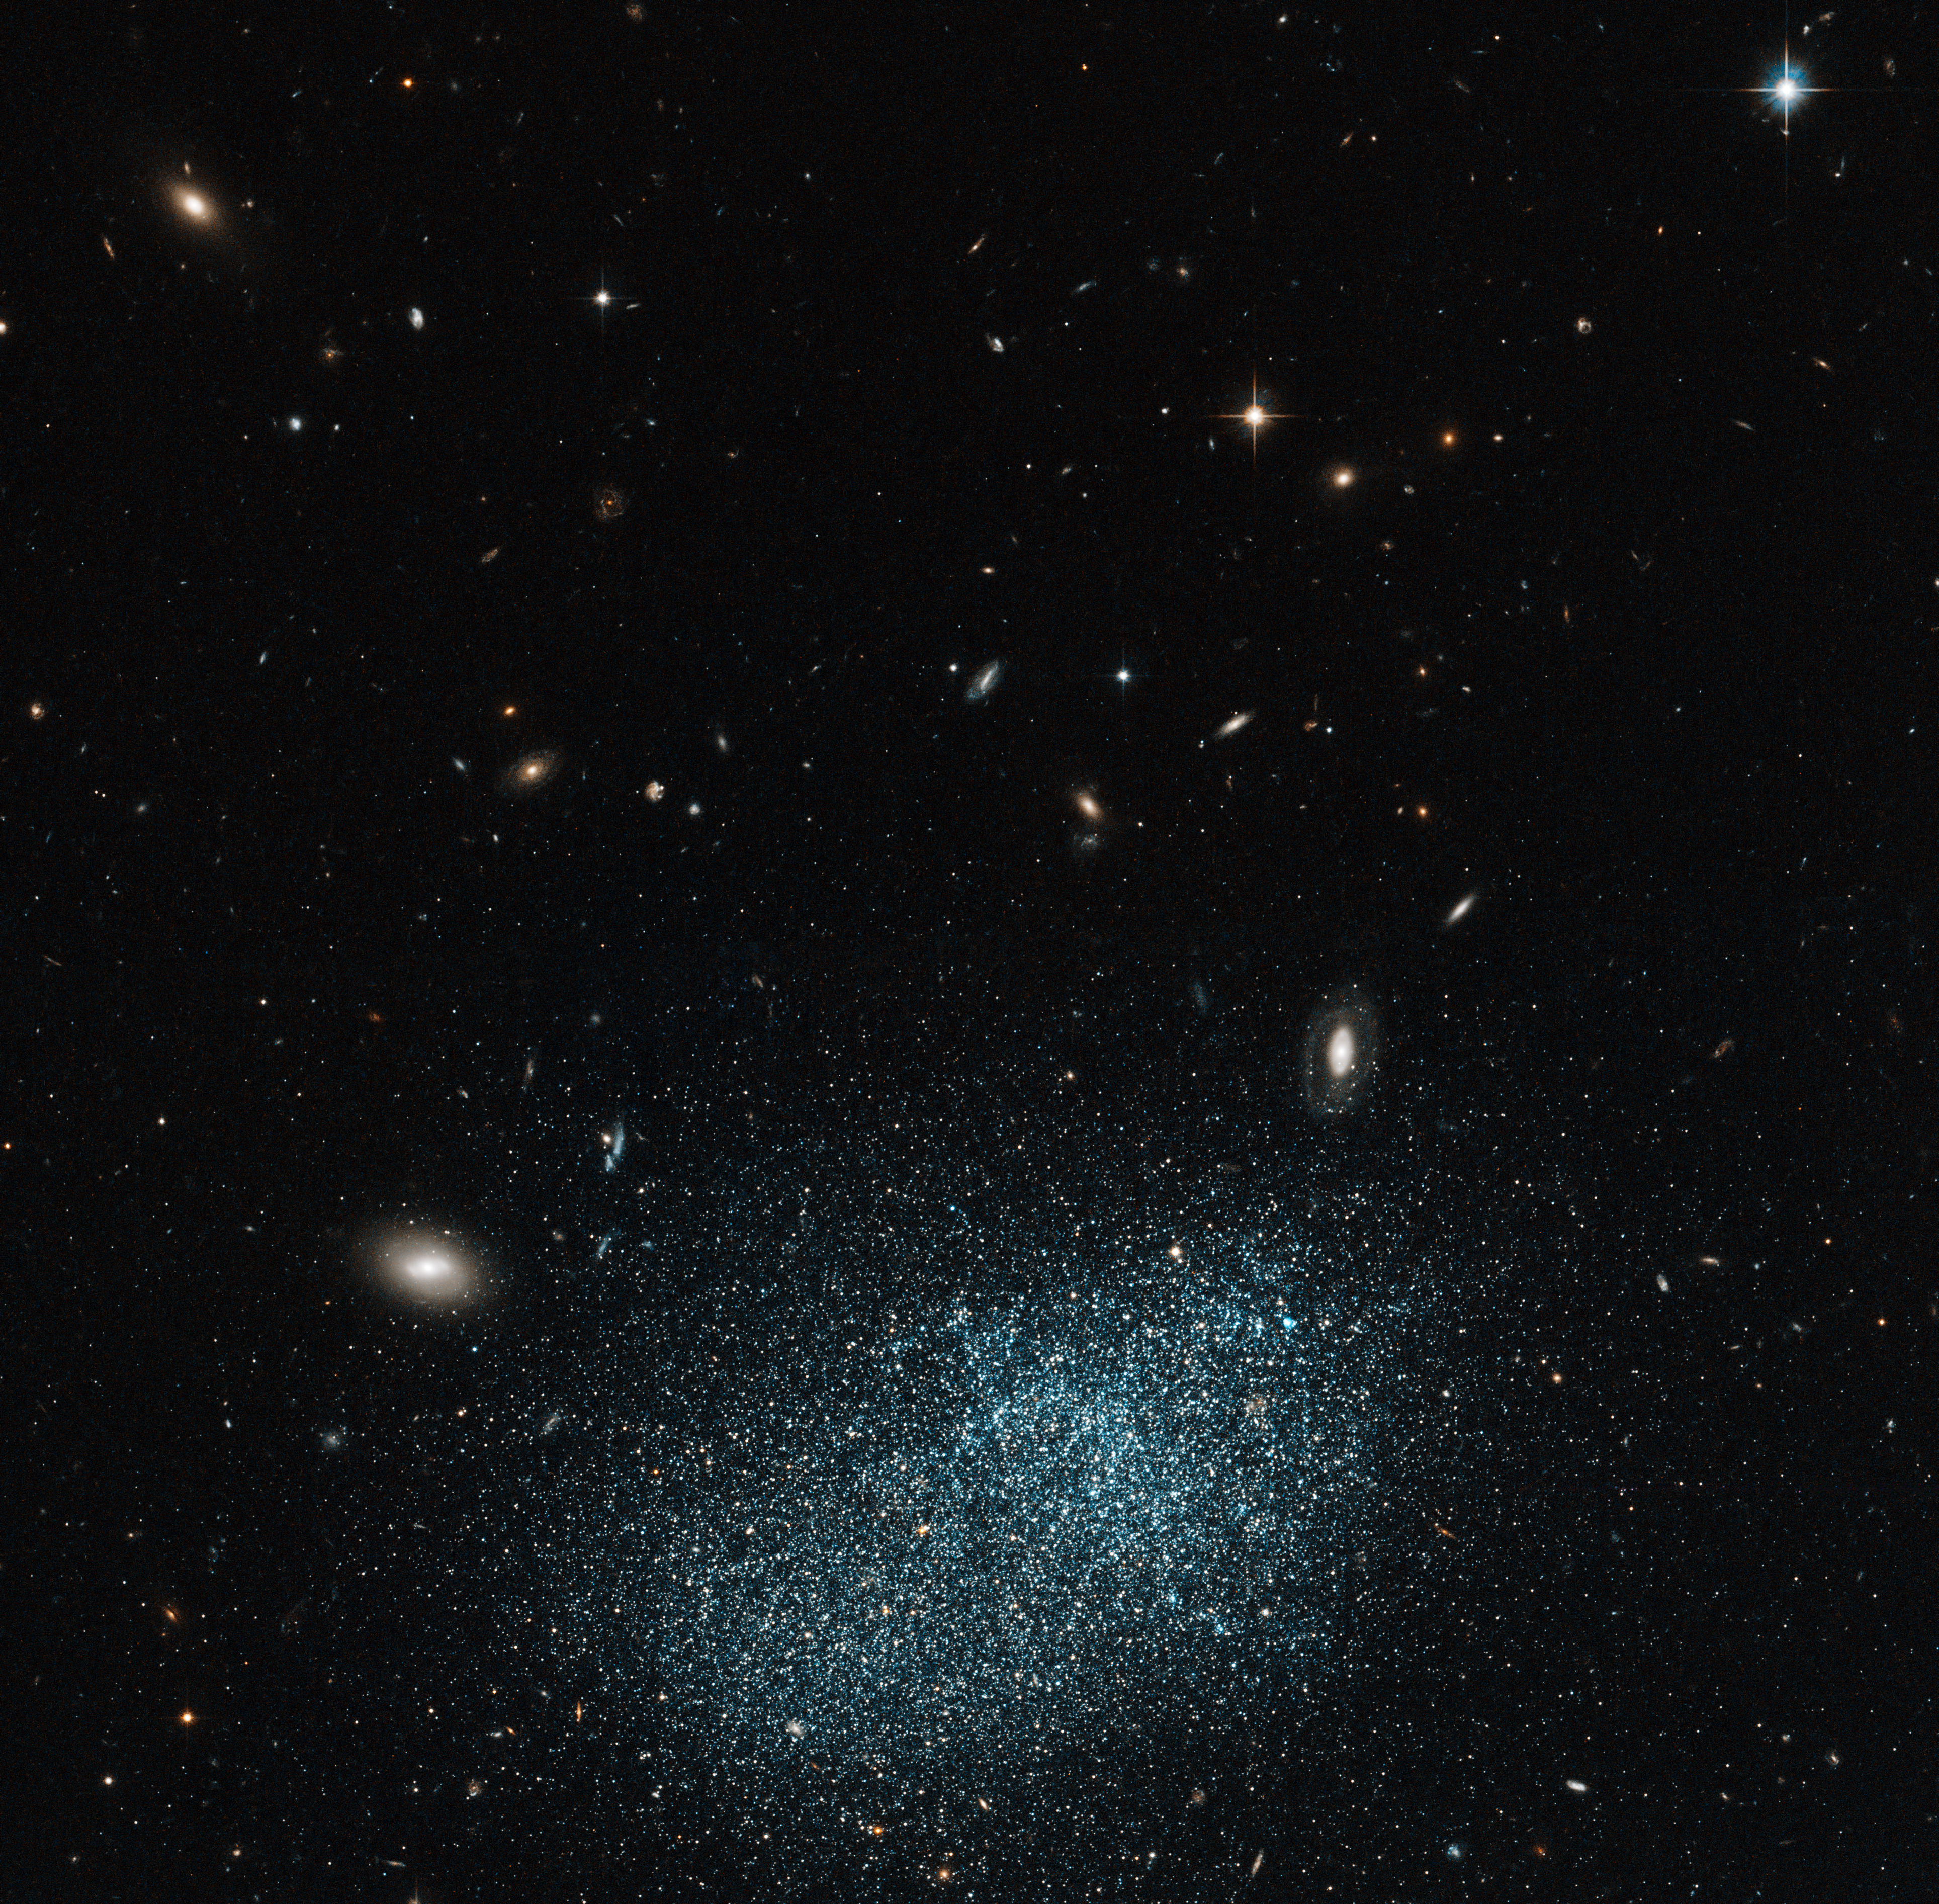

Dwarf galaxy: small but perfectly formed

Galaxies come in all sorts of shapes and sizes, with most being classed as either elliptical or spiral. However, some fall into the miscellaneous category known as irregulars, such as UGC 9128 shown here in this NASA/ESA Hubble Space Telescope image.

UGC 9128 is a dwarf irregular galaxy, which means that in addition to not having a well-defined shape, it probably contains only around one hundred million stars — far fewer than are found in a large spiral such as the Milky Way. Dwarf galaxies are important in understanding how the Universe has evolved and they are often referred to as galactic building blocks, as galaxies are thought to grow as smaller ones merge.

In recent years, astronomers have been trying to find out if dwarf galaxies contain a similar halo and disc structure to their much larger counterparts, whereby older stars are found in the extended spheroidal halo, with the flat disc being home to younger stars. Observations of UGC 9128 indicate that it does indeed contain a similar halo and disc structure.

UGC 9128 lies about 8 million light-years away, which means that it is part of the Local Group of more than 30 nearby galaxies, and it is found in the constellation of Boötes (The Herdsman). Despite its relative closeness it is very faint and was only discovered in the twentieth century. The Hubble image clearly resolves the galaxy’s starry population and also shows many much more distant galaxies in the background.

This picture was created from images taken with the Wide Field Channel of Hubble’s Advanced Camera for Surveys. Images through a yellow-orange filter (F606W, coloured blue) were combined with images taken in the near-infrared (F814W, coloured red). The total exposure times were 985 s and 1174 s respectively and the field of view is 3.2 arcminutes across.

Credit: ESA/Hubble & NASA